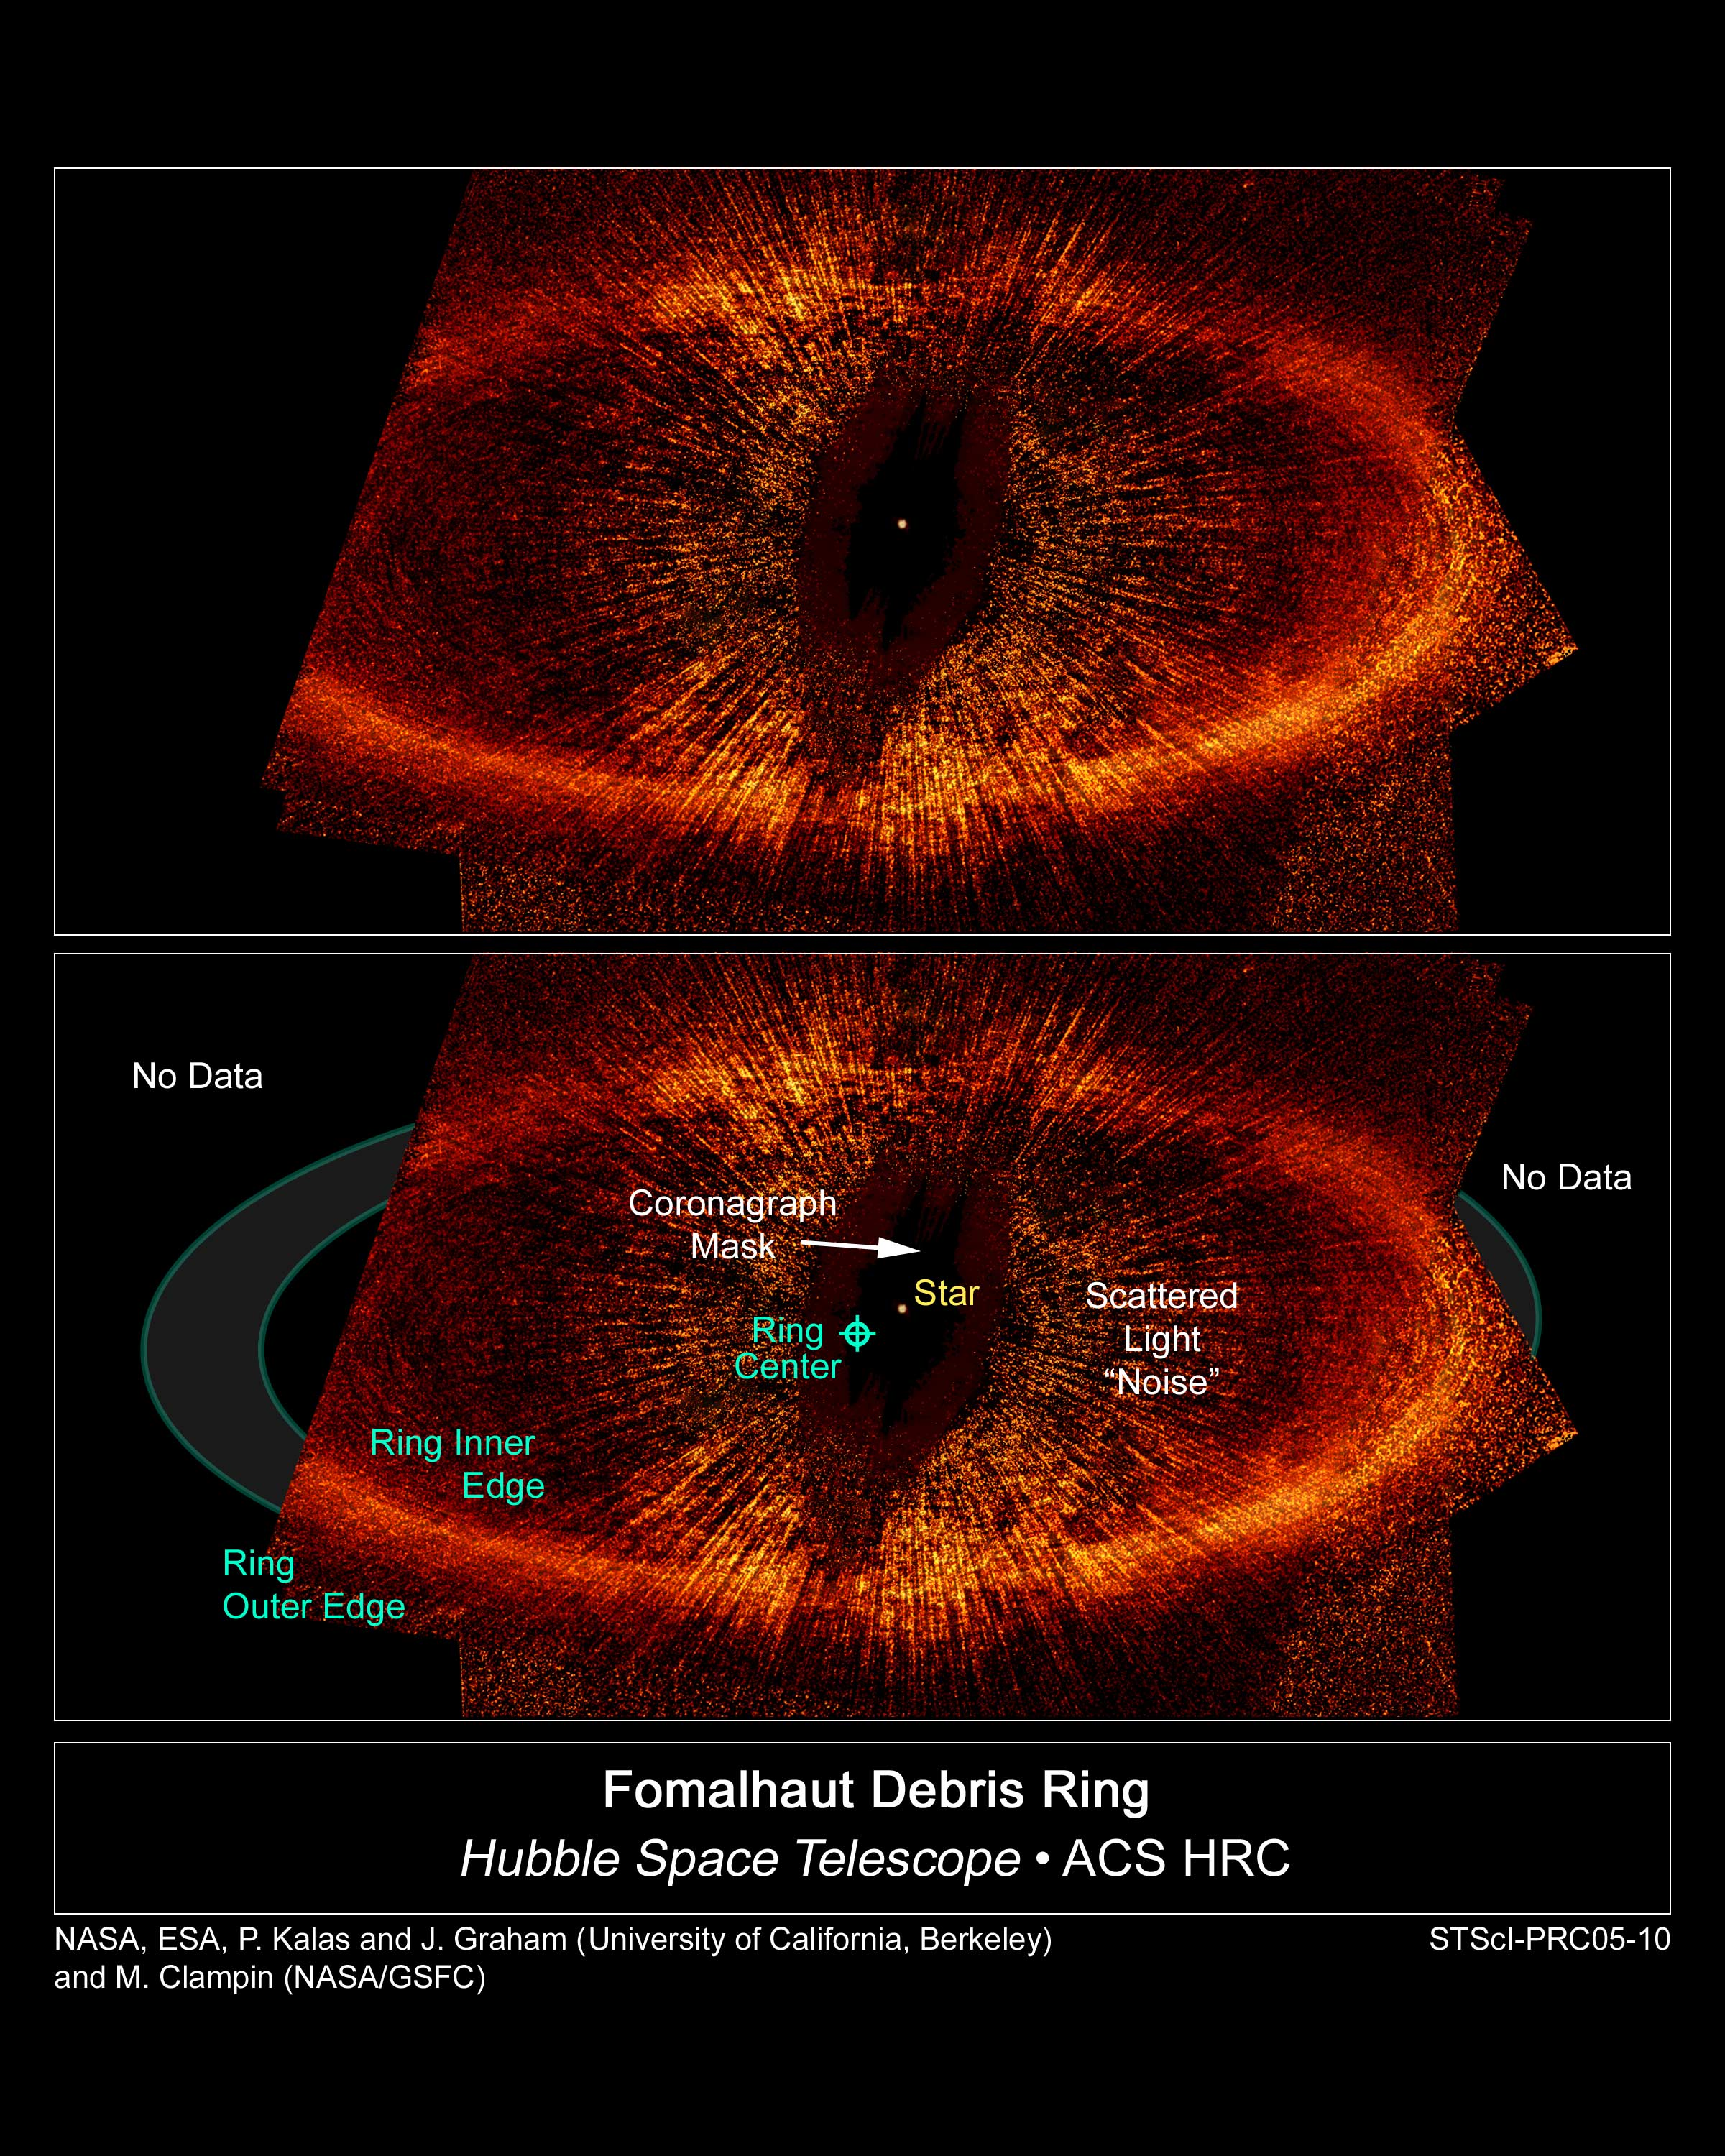

Debris Ring around a star

The top view, taken by NASA/ESA Hubble Space Telescope, is the first visible-light image of a dust ring around the nearby, bright young star Fomalhaut (HD 216956). The image offers the strongest evidence yet that an unruly planet may be tugging on the dusty belt. Part of the ring [at left] is outside the telescope's view. The ring is tilted obliquely to our line of sight.

The center of the ring is about 1.4 billion miles (15 astronomical units) away from the star. The dot near the ring's center marks the star's location. Astronomers believe that an unseen planet moving in an elliptical orbit is reshaping the ring.

The view at bottom points out important features in the image, such as the ring's inner and outer edges. Astronomers used the Advanced Camera for Surveys' (ACS) coronagraph aboard Hubble to block out the light from the bright star so they could see the faint ring. Despite the coronagraph, some light from the star is still visible in this image, as can be seen in the wagon wheel-like spokes that form an inner ring around Fomalhaut [labeled "scattered light 'noise'"].

Credit: NASA, ESA, P. Kalas and J. Graham (University of California, Berkeley), and M. Clampin (NASA's Goddard Space Flight Center)